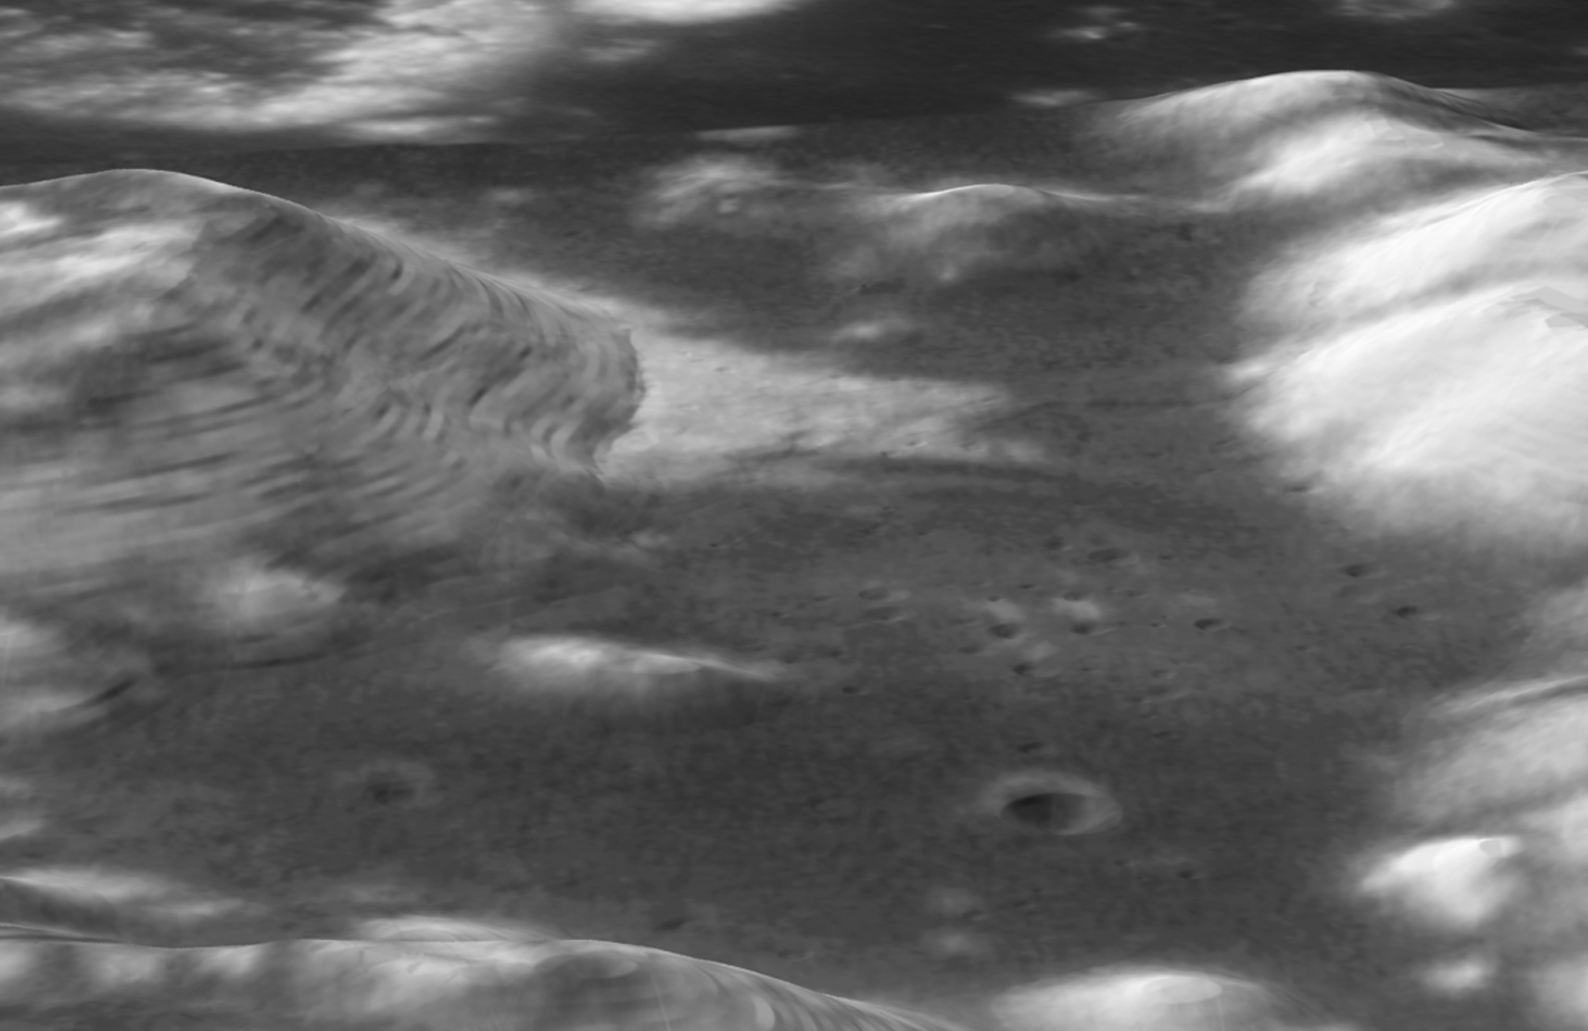

Hubble Image Overlaid on Modeling of Apollo 17 Landing Site

This image was constructed by overlaying the Hubble Advanced Camera for Surveys image of the Apollo 17 landing region within the Taurus-Littrow valley, taken on Dec. 16, 2005, with a digital-terrain model acquired by the Apollo program to provide a perspective view looking from west to east up the valley. These Hubble data illustrate the high-resolution resolving power of the Advanced Camera for Surveys and display features smaller than a soccer field from low-Earth orbit some 400,000 kilometers distant. These images were acquired at nearly full Moon, so the long, dark shadows typical of many lunar orbital photos are not seen; however, this is perfect lighting for colour analysis from which to interpret subtle compositional differences. The Hubble Space Telescope Lunar Exploration team is using the Apollo 17 images (and those acquired of the Apollo 15 site) as "ground-truth" in an effort to discriminate lunar materials enriched in ilmenite, a titanium-bearing oxide of potential value as a resource in human exploration of the Moon. The image was processed by the Hubble Space Telescope Lunar Exploration team at NASA's Goddard Space Flight Center, Northwestern University, and the Space Telescope Science Institute.

Credit: NASA, ESA, and J. Garvin (NASA/GSFC)